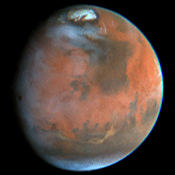

Mars Pathfinder Landing Site

Hubble Space Telescope images of Mars, taken on June 27, 1997, reveal a significant dust storm which fills much of the Valles Marineris canyon system and extends into Xanthe Terra, about 600 miles (1000 kilometers) south of the landing site.

Credit: Steve Lee (University of Colorado), Mike Wolff and Phil James (University of Toledo) and NASA/ESA